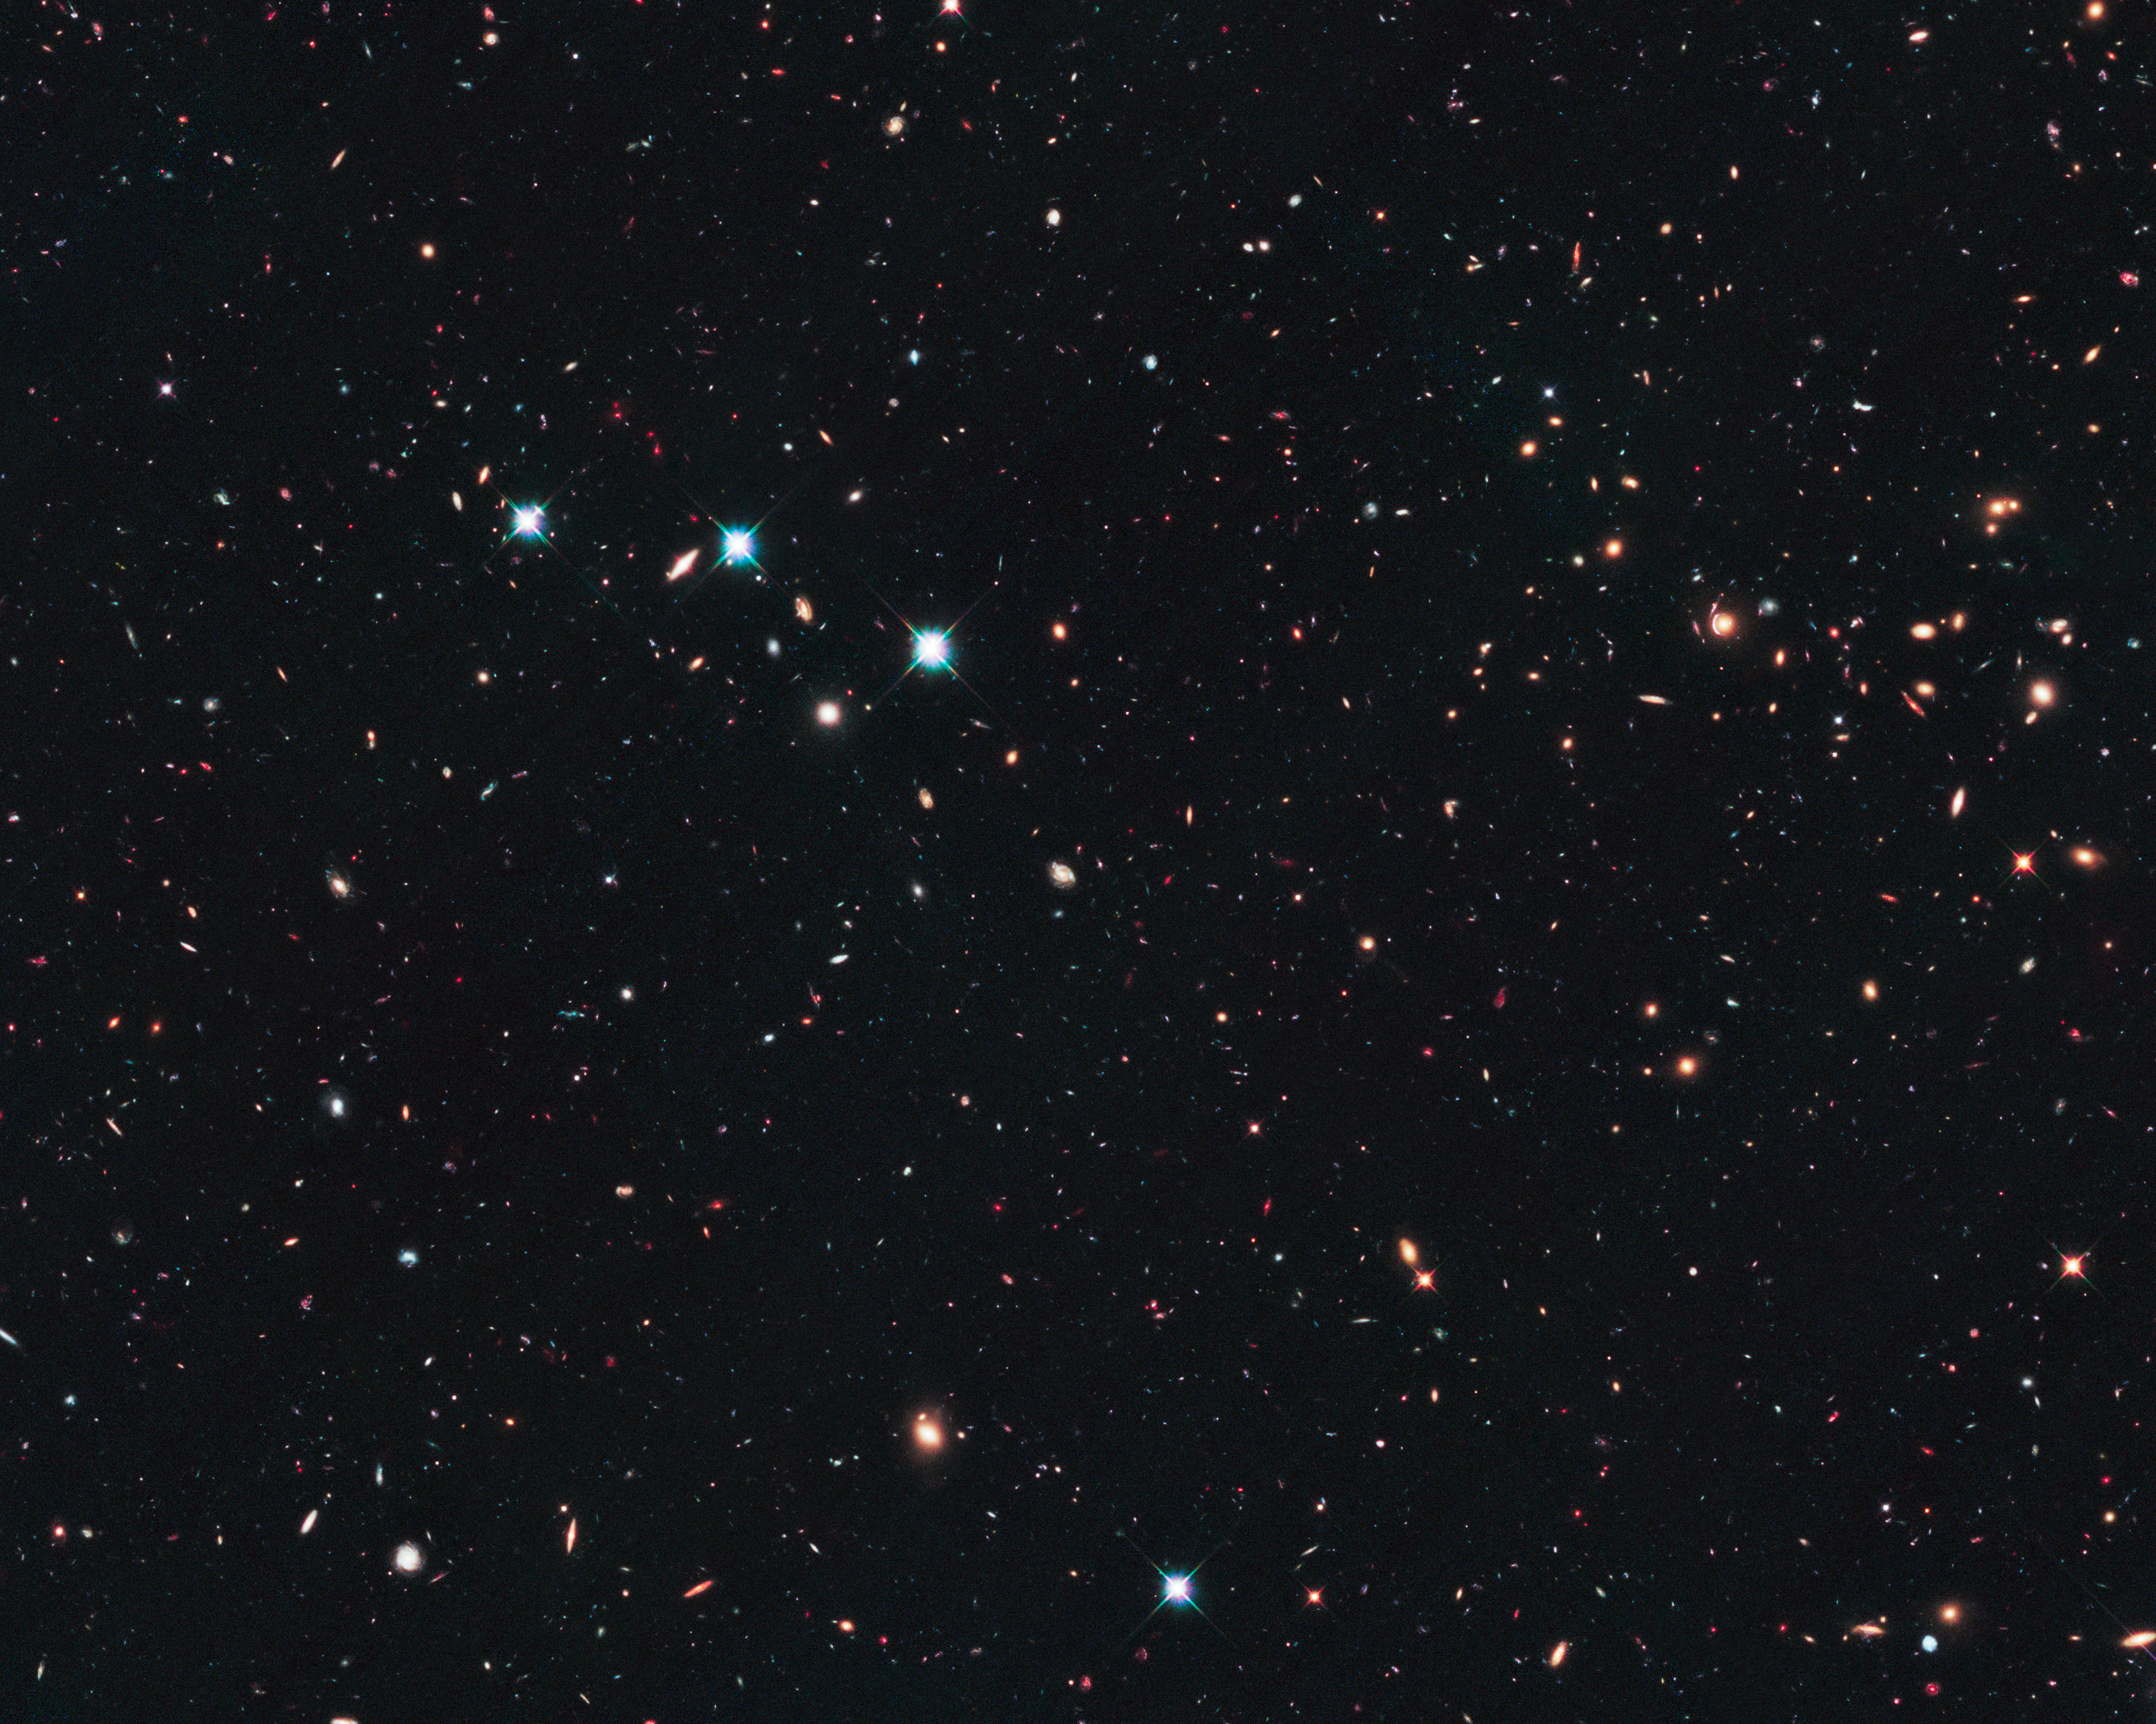

The CANDELS Ultra Deep Survey (UDS)

This image shows the field covered by the CANDELS Ultra Deep Survey.

Credit: NASA, ESA, A. Riess (STScI and JHU), D. Jones and S. Rodney (JHU), S. Faber (University of California, Santa Cruz), H. Ferguson (STScI), and the CANDELS team.